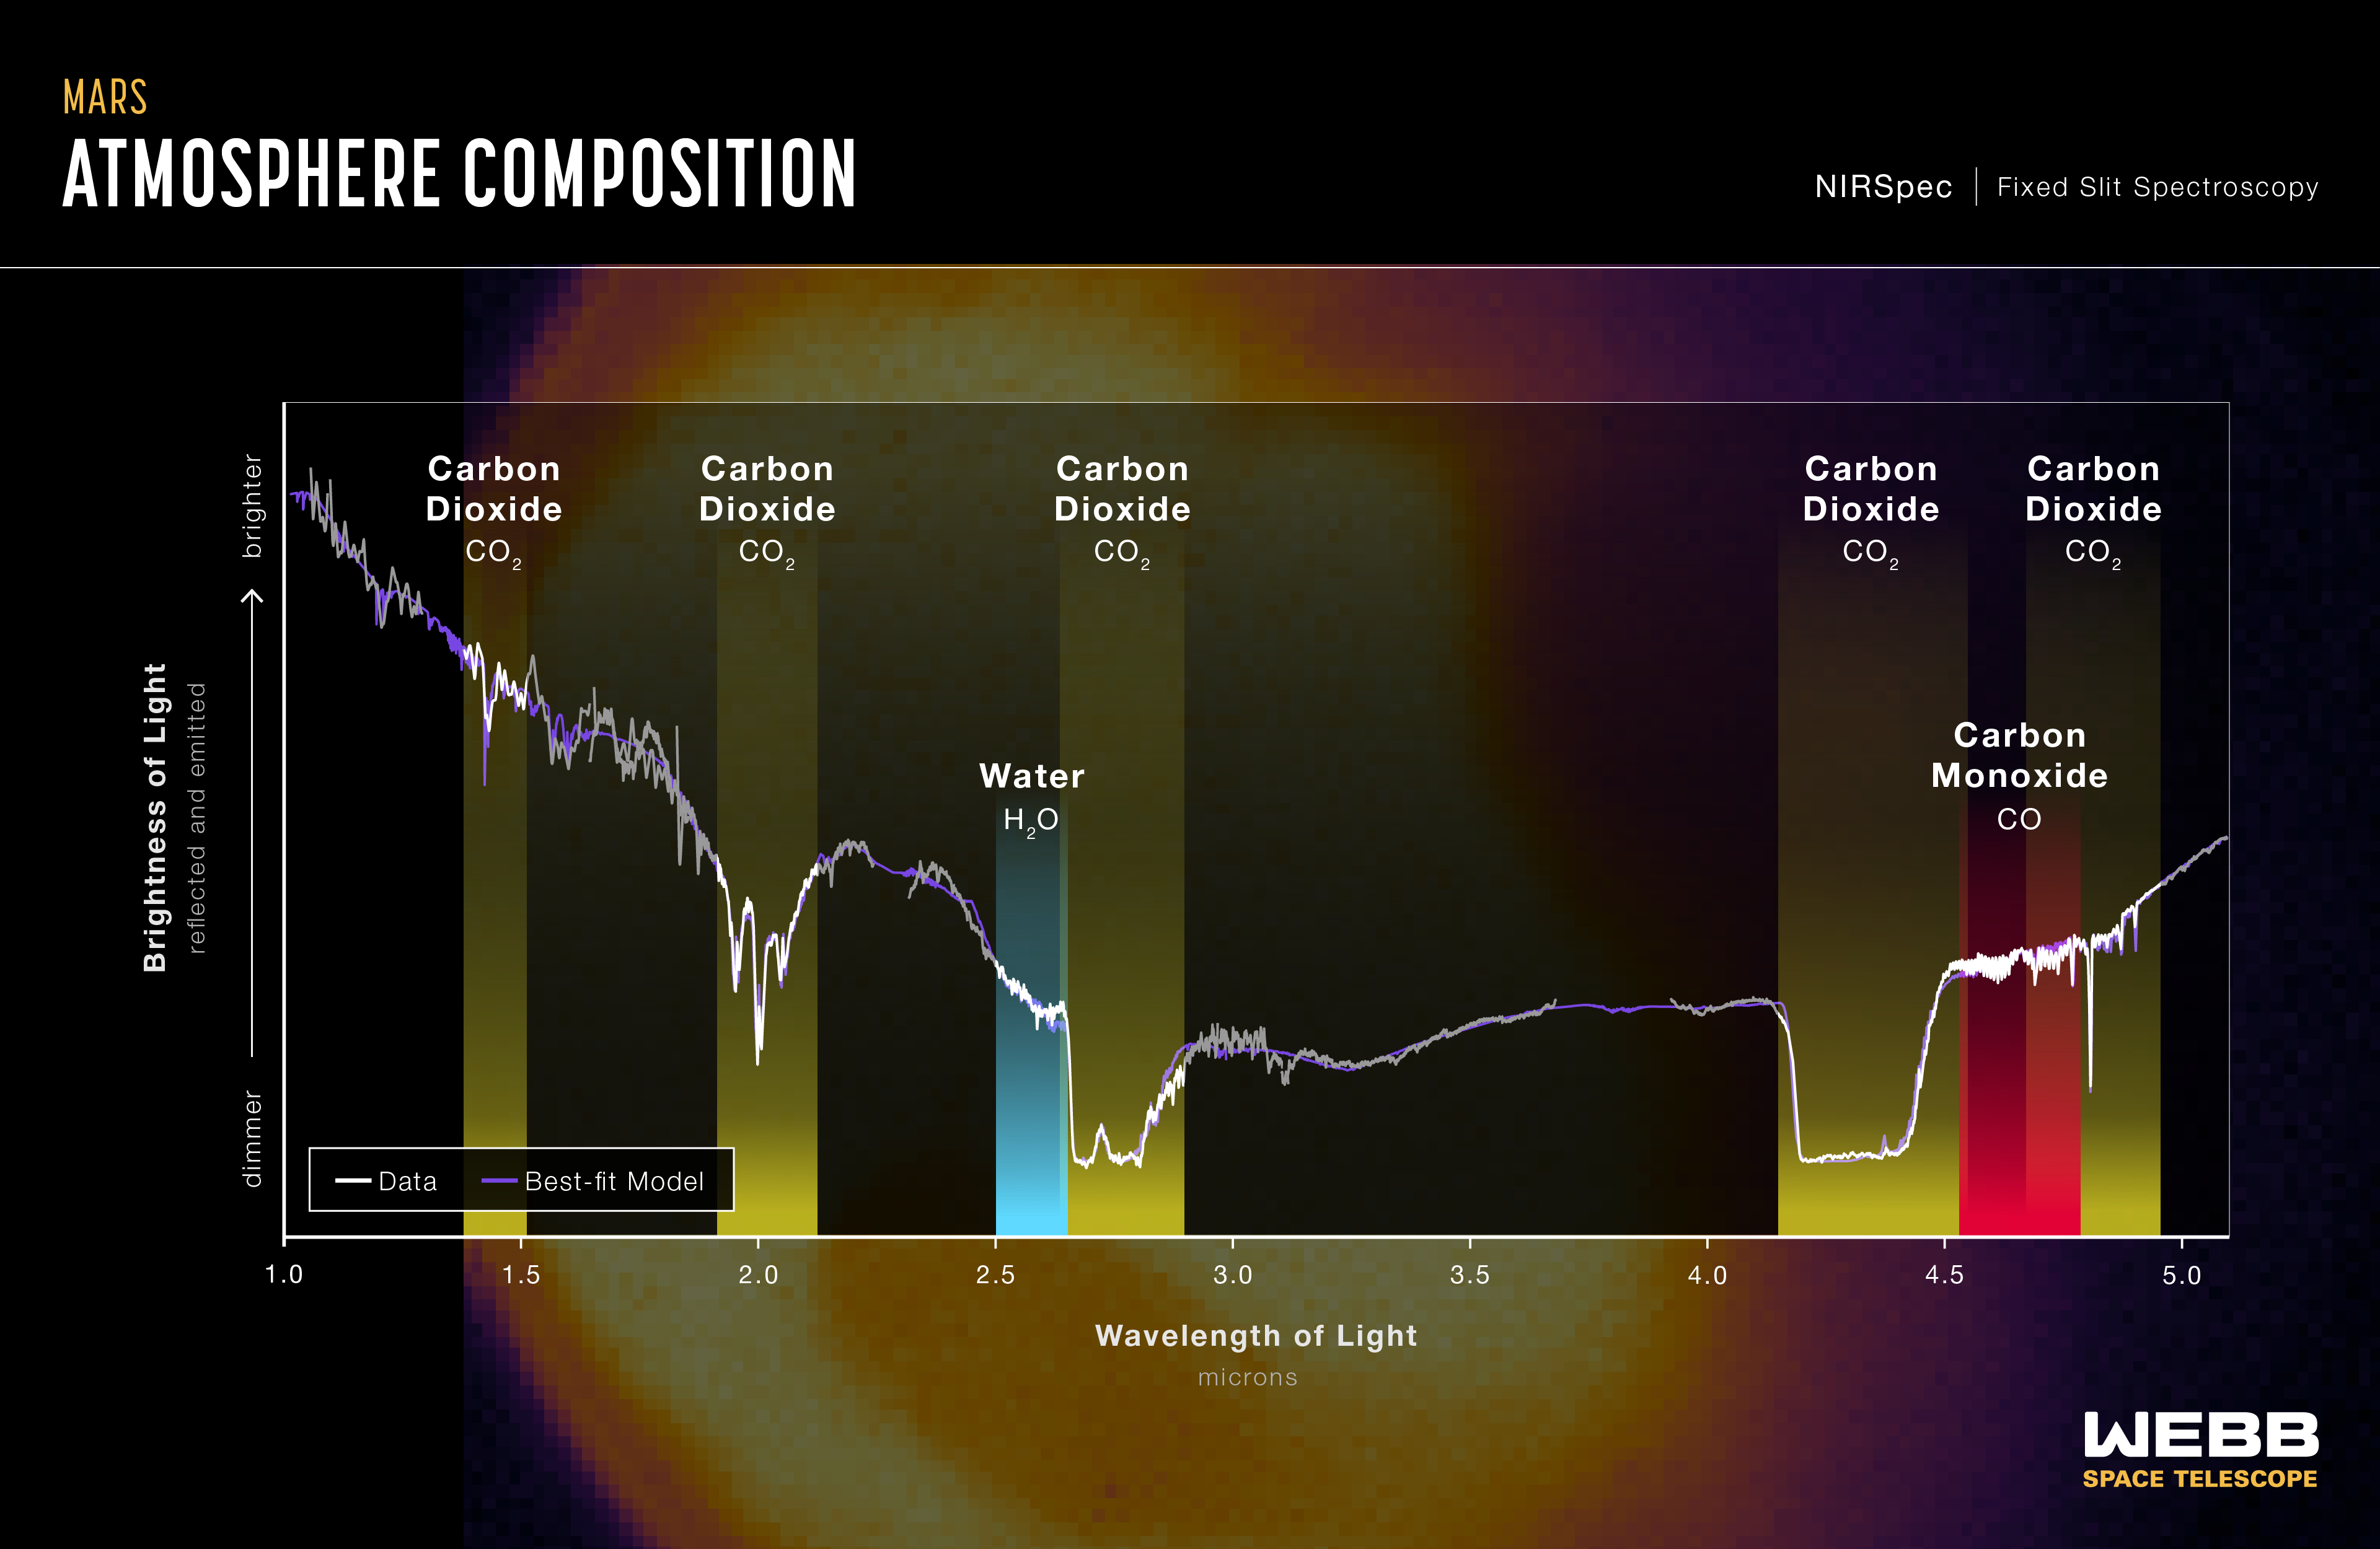

Mars Is Mighty in First Webb Infrared Spectrum of Red Planet

This is Webb’s first near-infrared spectrum of Mars, demonstrating Webb’s power to study the Red Planet with spectroscopy.

The James Webb Space Telescope captured its first images and spectra of Mars on 5 September 2022. The telescope, an international collaboration between NASA, ESA and the Canadian Space Agency, provides a unique perspective with its infrared sensitivity on our neighbouring planet, complementing data being collected by orbiters, rovers, and other telescopes.

Webb’s unique observation post roughly 1.5 million kilometres away at the Sun-Earth Lagrange point 2 (L2) provides a view of Mars’ observable disk (the portion of the sunlit side that is facing the telescope). As a result, Webb can capture images and spectra with the spectral resolution needed to study short-term phenomena like dust storms, weather patterns, seasonal changes, and, in a single observation, processes that occur at different times (daytime, sunset, and nighttime) of a Martian day.

Because it is so close, the Red Planet is one of the brightest objects in the night sky in terms of both visible light (which human eyes can see) and the infrared light that Webb is designed to detect. This poses special challenges to the observatory, which was built to detect the extremely faint light of the most distant galaxies in the universe. Webb’s instruments are so sensitive that without special observing techniques, the bright infrared light from Mars is blinding, causing a phenomenon known as “detector saturation.” Astronomers adjusted for Mars’ extreme brightness by using very short exposures, measuring only some of the light that hit the detectors, and applying special data analysis techniques.

Whereas the Mars images show differences in brightness integrated over a large number of wavelengths from place to place across the planet at a particular day and time, the spectrum shows the subtle variations in brightness between hundreds of different wavelengths representative of the planet as a whole. Astronomers will analyse the features of the spectrum to gather additional information about the surface and atmosphere of the planet.

This near-infrared spectrum of Mars was captured by the Near-Infrared Spectrograph (NIRSpec) on 5 September 2022, over 3 slit gratings (G140H, G235H, G395H). The spectrum is dominated by reflected sunlight at wavelengths shorter than 3 microns and thermal emission at longer wavelengths. Preliminary analysis reveals the spectral dips appear at specific wavelengths where light is absorbed by molecules in Mars’ atmosphere, specifically carbon dioxide, carbon monoxide, and water. Other details reveal information about dust, clouds, and surface features. By constructing a best-fit model of the spectrum, by using, for example, the Planetary Spectrum Generator, abundances of given molecules in the atmosphere can be derived.

These observations of Mars were conducted as part of Webb’s Cycle 1 Guaranteed Time Observation (GTO) Solar System program led by Heidi Hammel of AURA.

ESA operates two Mars orbiters, Mars Express and the ExoMars Trace Gas Orbiter, that have brought a treasury of insight into the Red Planet’s atmosphere and surface. Furthermore, ESA collaborates with the Japanese Aerospace Exploration Agency (JAXA) on the Martian Moons eXploration (MMX) mission, soon to launch for Mars’ moon Phobos.

NIRSpec was built for the European Space Agency (ESA) by a consortium of European companies led by Airbus Defence and Space (ADS) with NASA’s Goddard Space Flight Centre providing its detector and micro-shutter subsystems.

Note: This post highlights images from Webb science in progress, which has not yet been through the peer-review process.

Credit: NASA, ESA, CSA, STScI, Mars JWST/GTO team